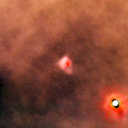

177-541

One of 42 new proplyds discovered in the Orion Nebula, 177-541 is one of the bright proplyds that lies relatively close to the nebula’s brightest star, Theta 1 Orionis C.

Credit: NASA/ESA and L. Ricci (ESO)